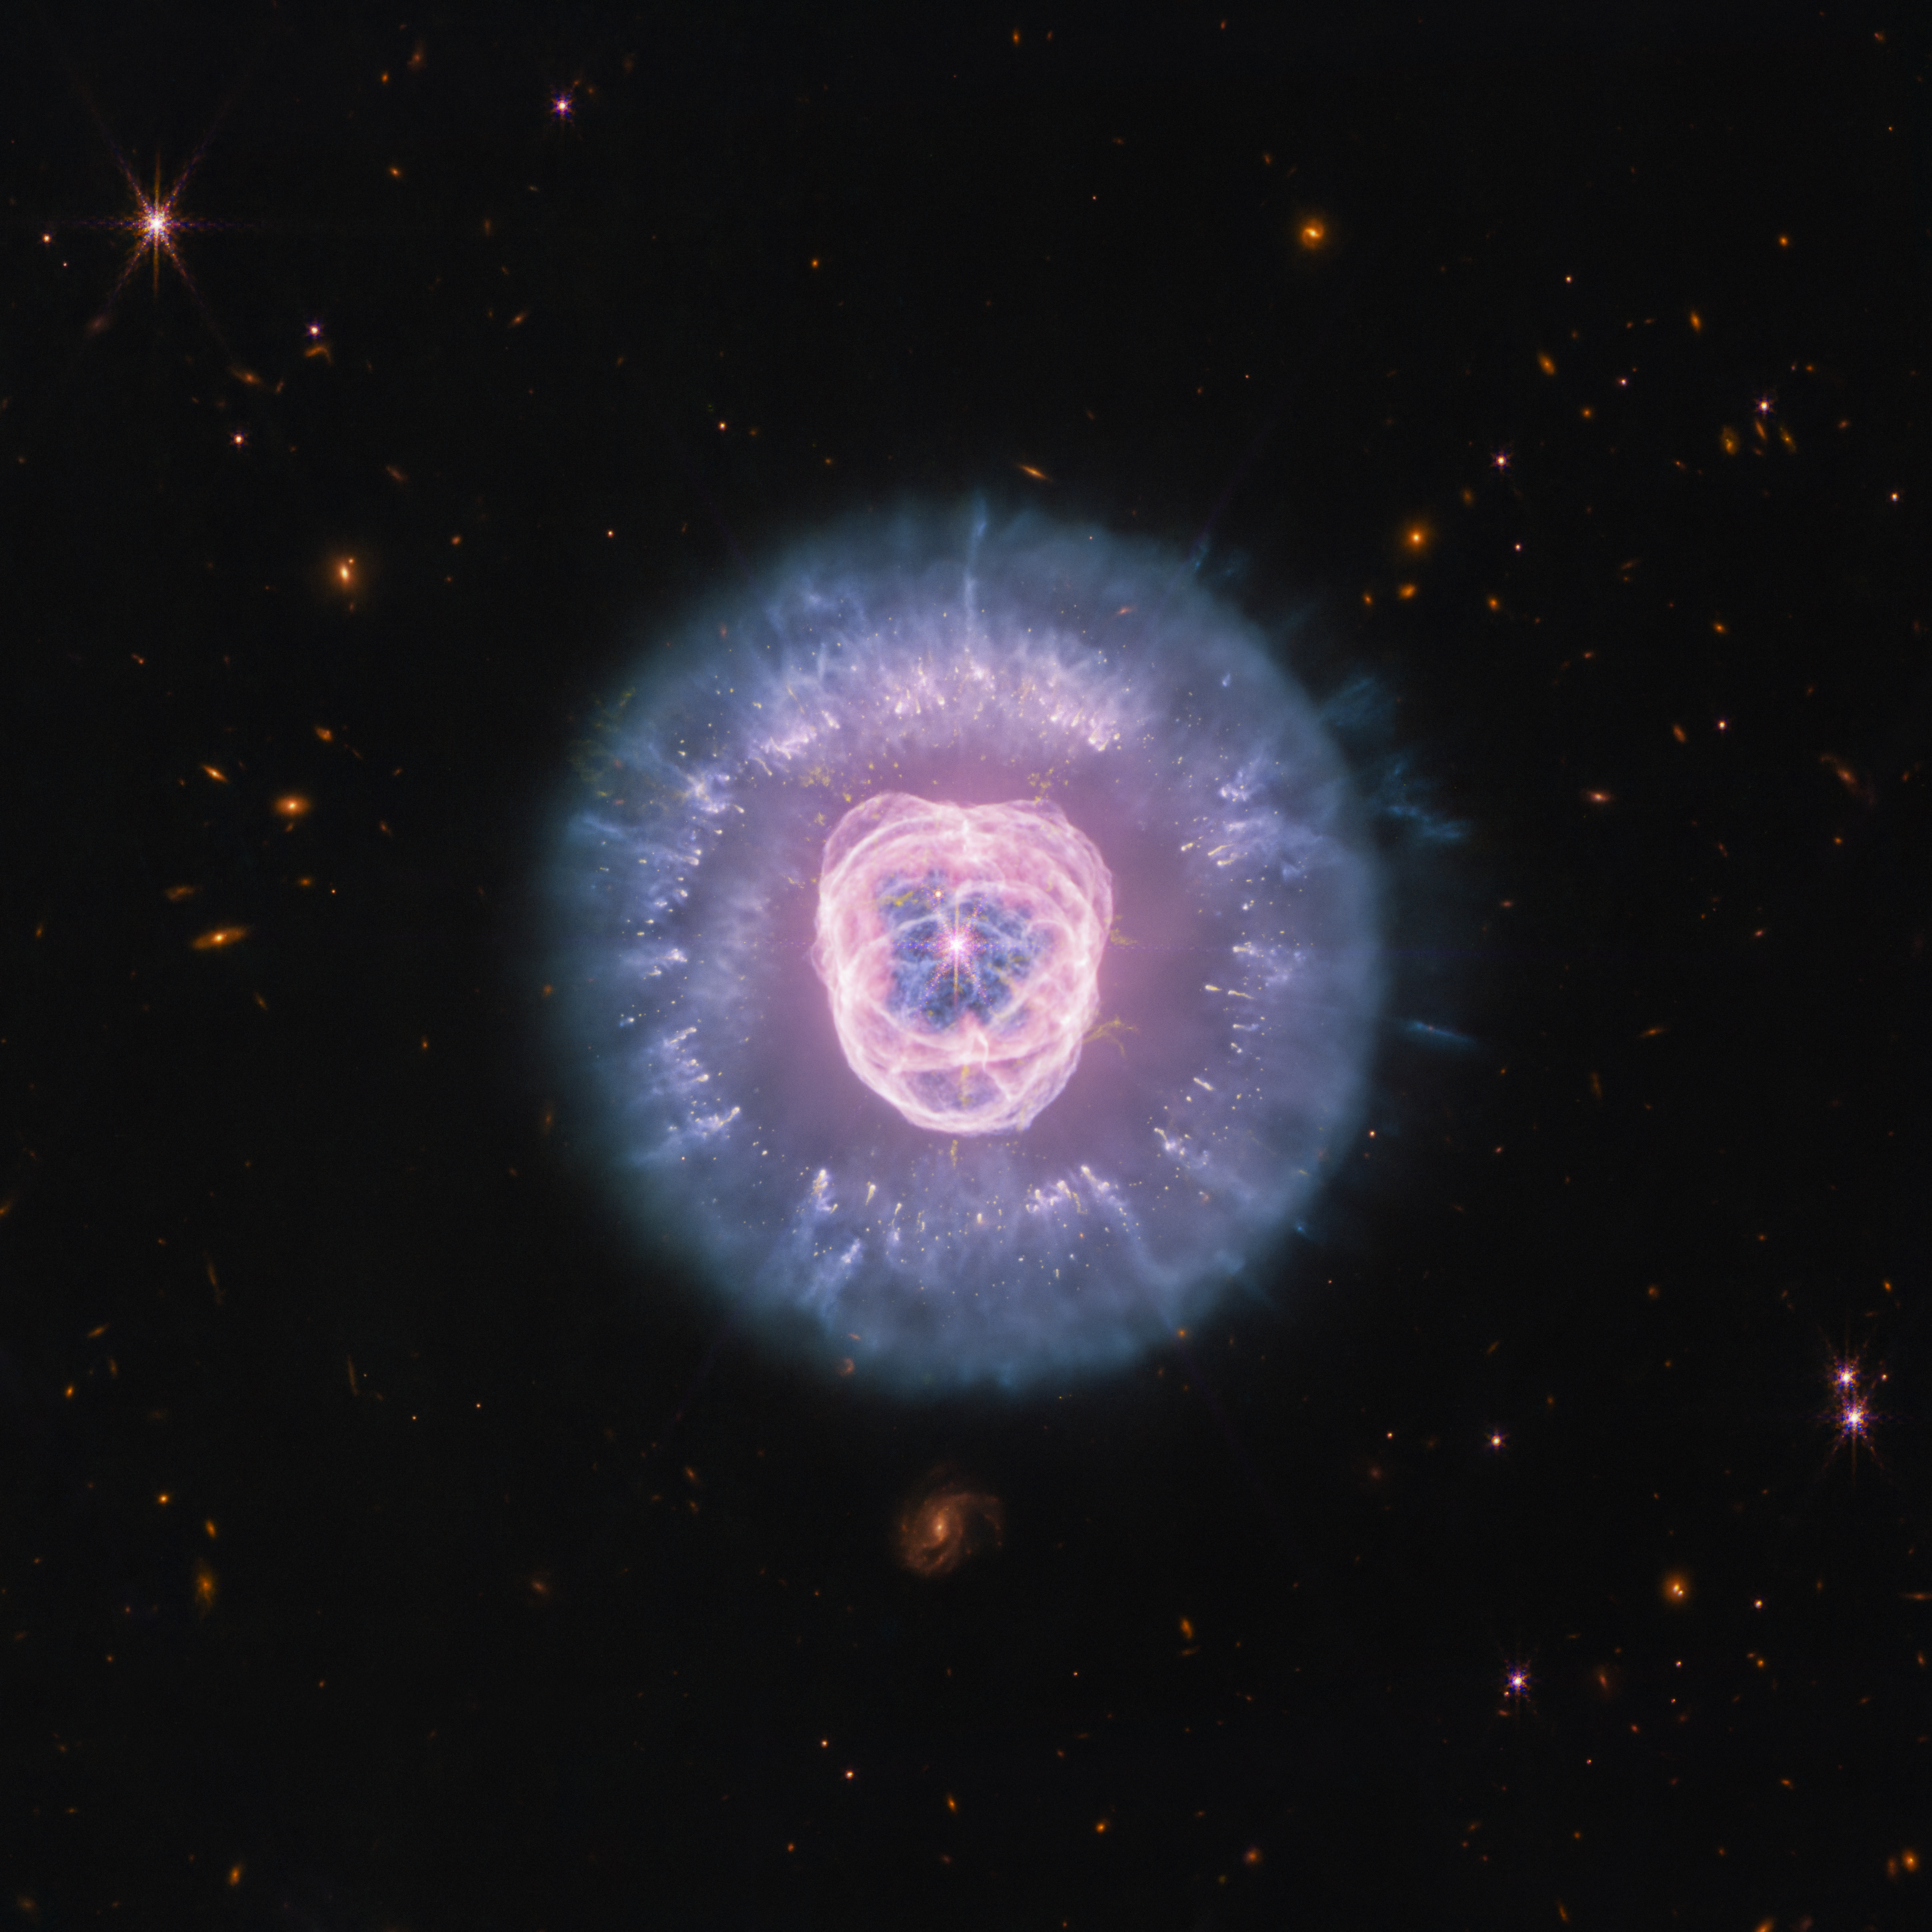

Lion Nebula (NIRCam + MIRI image)

The James Webb Space Telescope recently imaged planetary nebula NGC 2392, which is nicknamed the Lion Nebula due to its distinct shape. This near- and mid-infrared composite image reveals the complex structure of the nebula, which has formed and continues to be sculpted by the remains of a dying star. The stellar core, also known as a white dwarf, is located at the centre and looks like the button nose of the lion.

The central dying star is so hot that its radiation is “cooking” everything from the inside and producing a bubble of ionized hydrogen gas as it does. The gas bubble, which is the lion’s “face,” features cavernous shells and rings with tendrils that are expanding and destroying dust upon encounter.

However, not all dust is obliterated from the scene. The lion’s mane is the interior of a dust shell that is being illuminated by the central star’s core. Within the mane some compact clumps of dust (red and orange) have managed to survive so far and are protecting the material that lies behind them. Additional clumps of molecular hydrogen appear yellow.

The Lion Nebula is a snapshot in time. It’s taken several thousand years for the gas and dust to be shaped in this way, and it continues to change as the star drives away the material. Astronomers estimate NGC 2392 will eventually disperse in about 10,000 years, which is a relatively short period in astronomical terms.

Credit: NASA, ESA, CSA, STScI. Image Processing: A. Pagan (STScI).